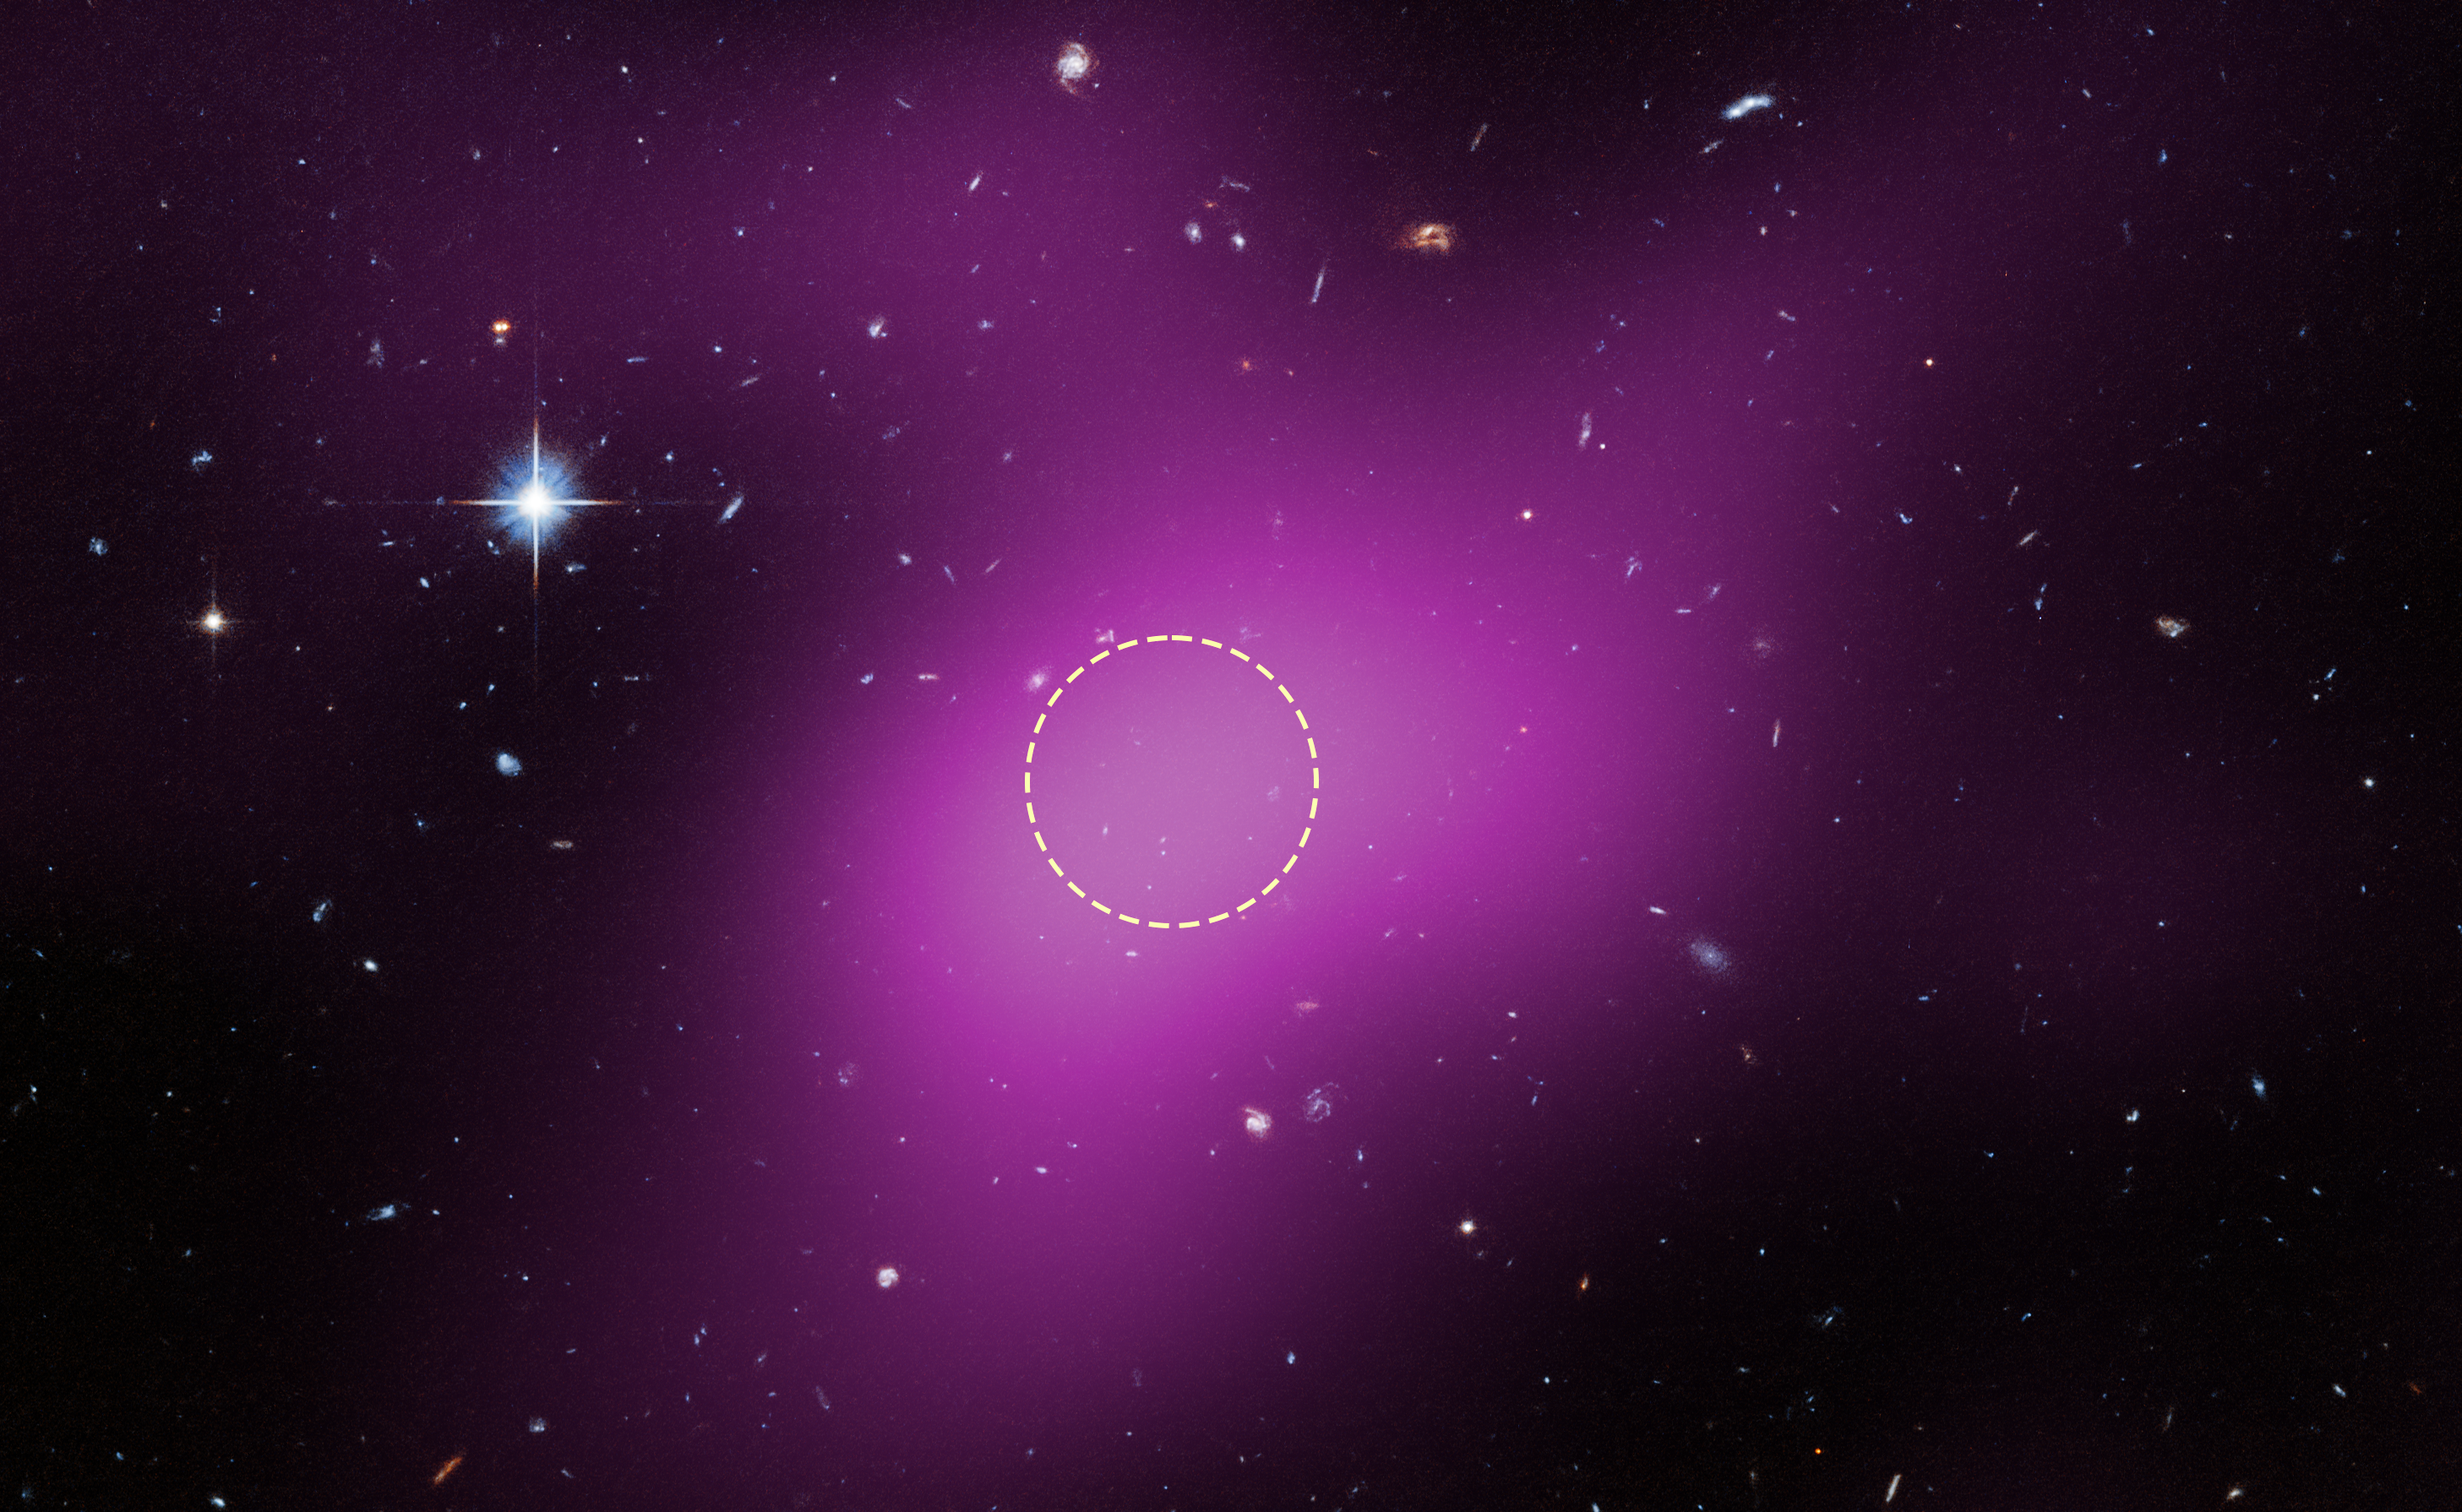

Location of Cloud-9

This image shows the location of Cloud-9. The diffuse magenta is radio data from the ground-based Very Large Array (VLA) showing the presence of the cloud. The dashed circle marks the peak of radio emission,which is where researchers focused their search for stars. Follow-up observations by the NASA/ESA Hubble Space Telescope’s Advanced Camera for Surveys found no stars within the cloud. The few objects that appear within its boundaries are background galaxies. Before the Hubble observations, scientists could argue that Cloud-9 is a faint dwarf galaxy whose stars could not be seen with ground-based telescopes due to the lack of sensitivity. Hubble’s Advanced Camera for Surveys shows that, in reality, the failed galaxy contains no stars.

Credit: NASA, ESA. G. Anand (STScI), and A. Benitez-Llambay (Univ. of Milan-Bicocca); Image processing: J. DePasquale (STScI)